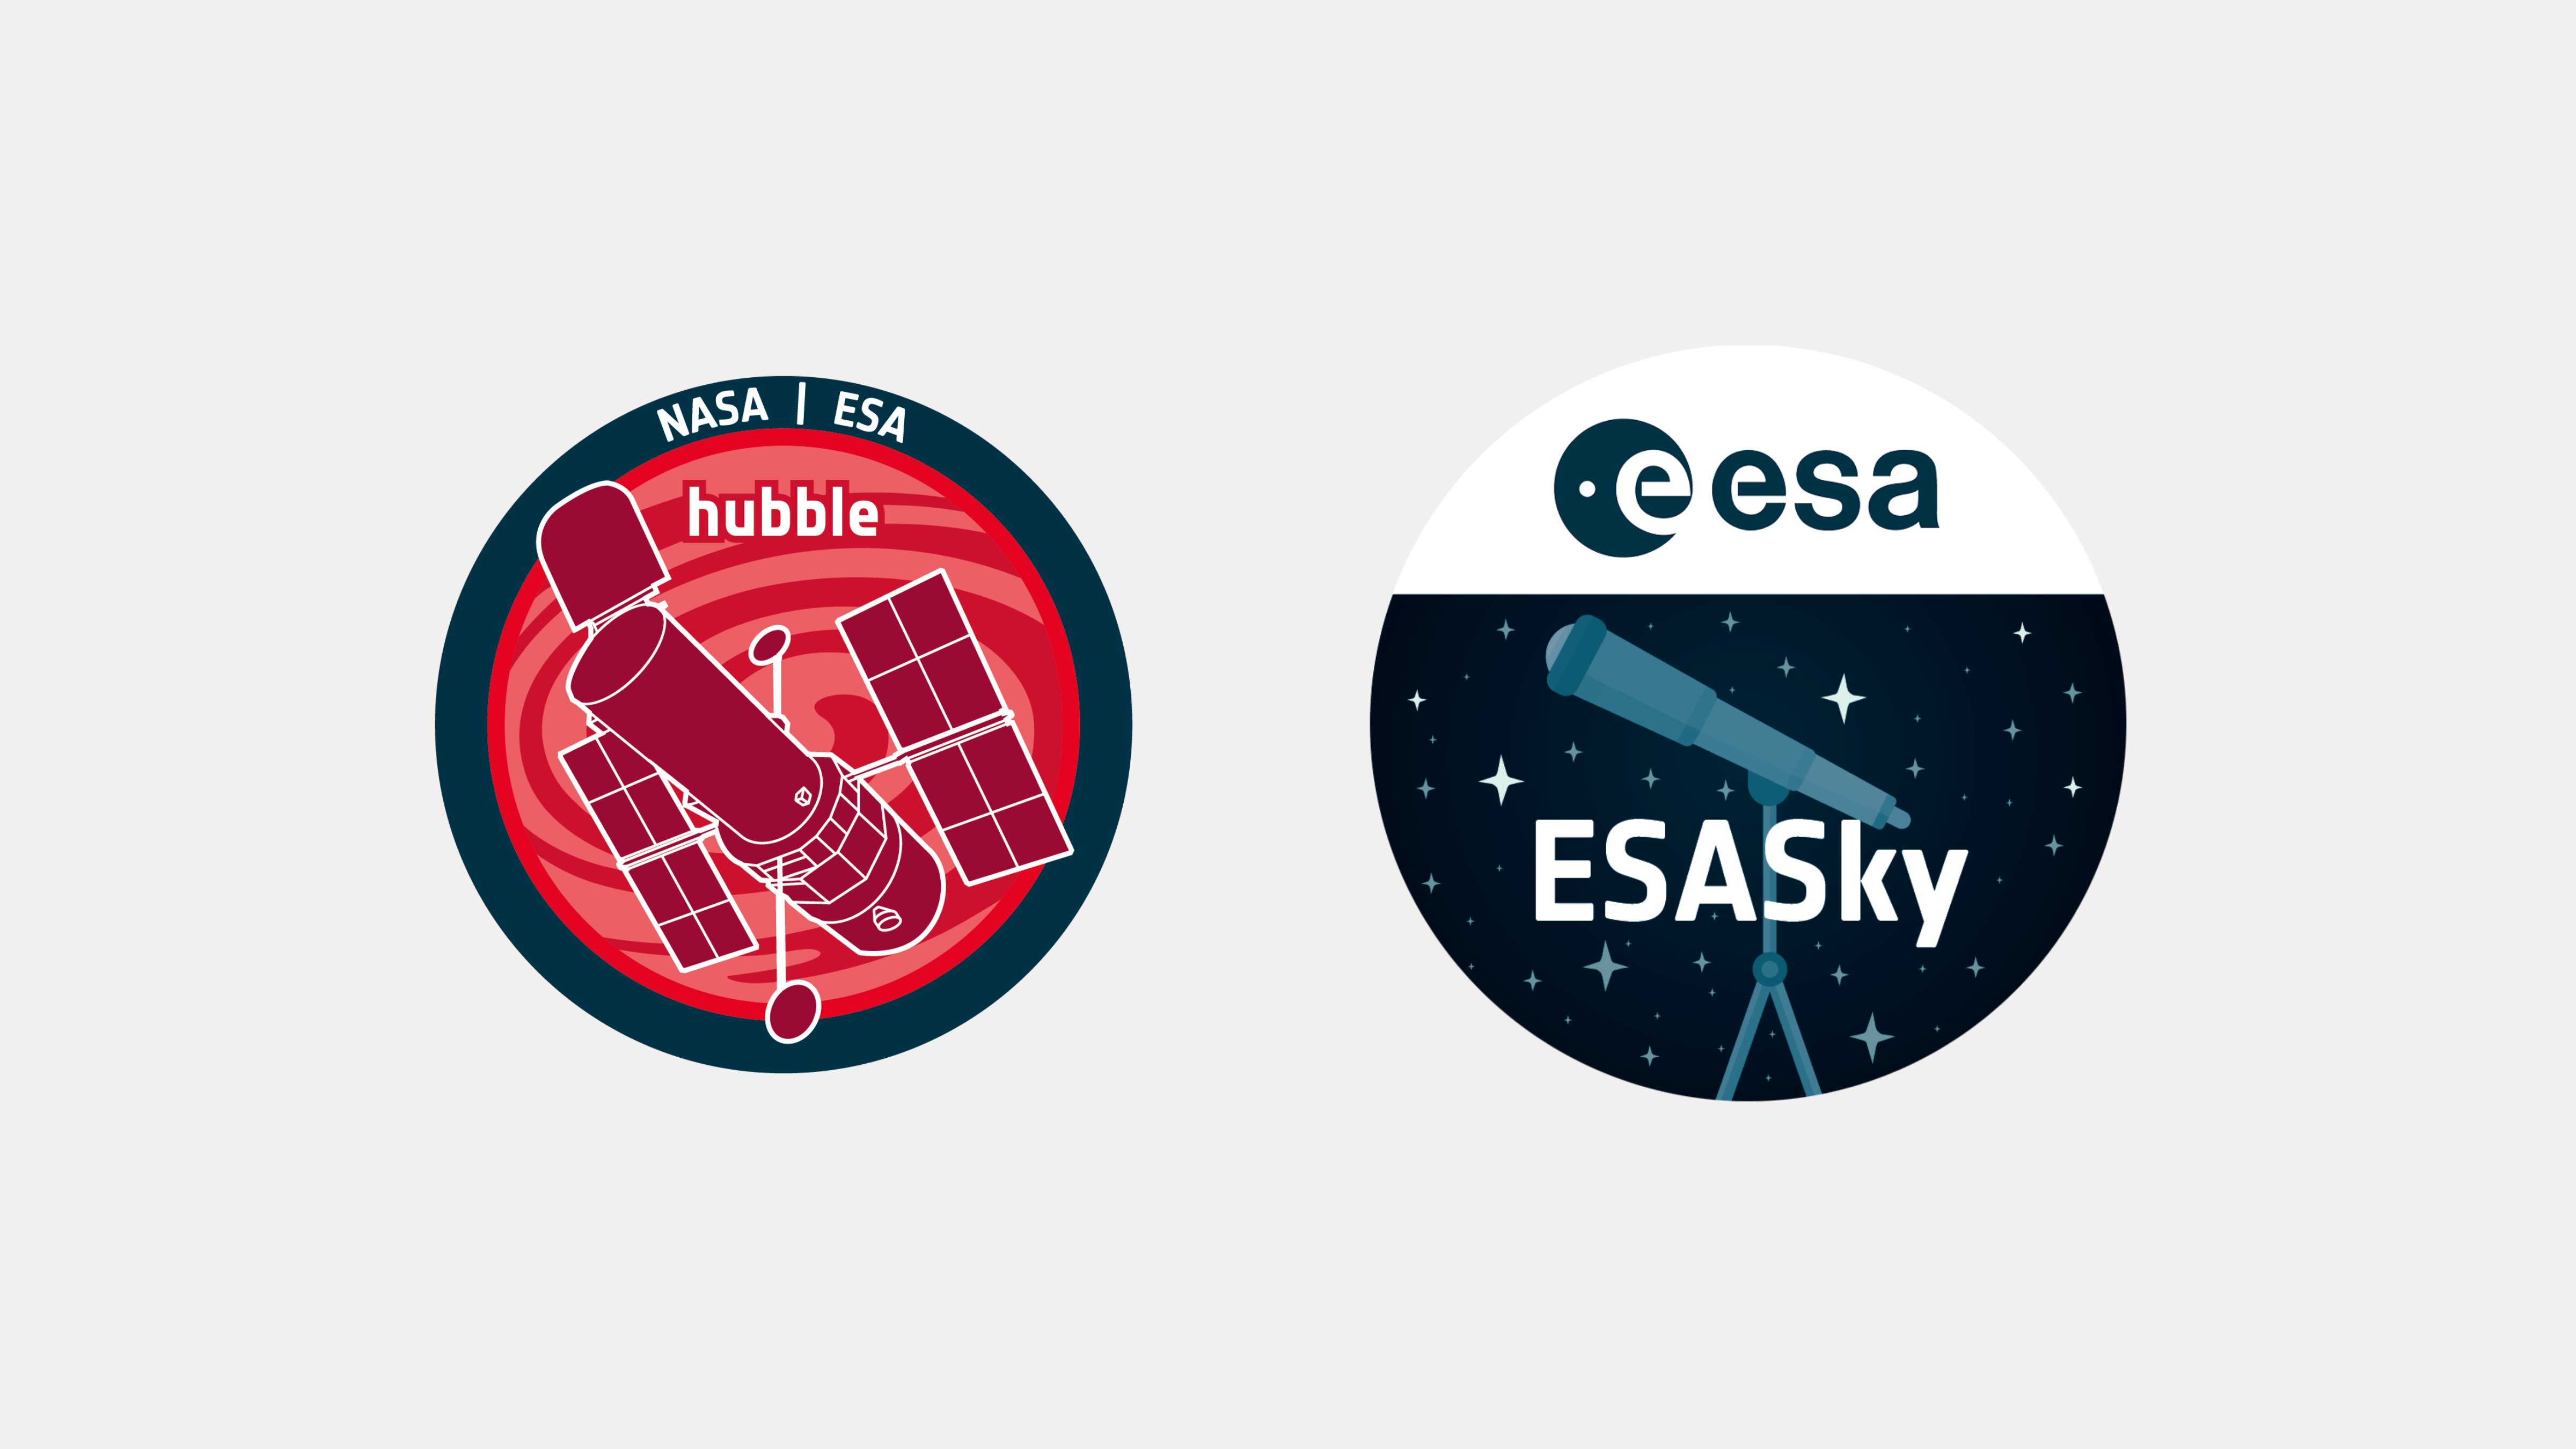

Announcement of the ESA/Hubble and ESA Sky Collaboration

The ESA/Hubble and ESASky team have collaboratively developed an application programming interface that connects the outreach images on the ESA/Hubble website with the ESASky application, which allows users to visualise public astronomical data.

Credit: ESA/Hubble and ESASky